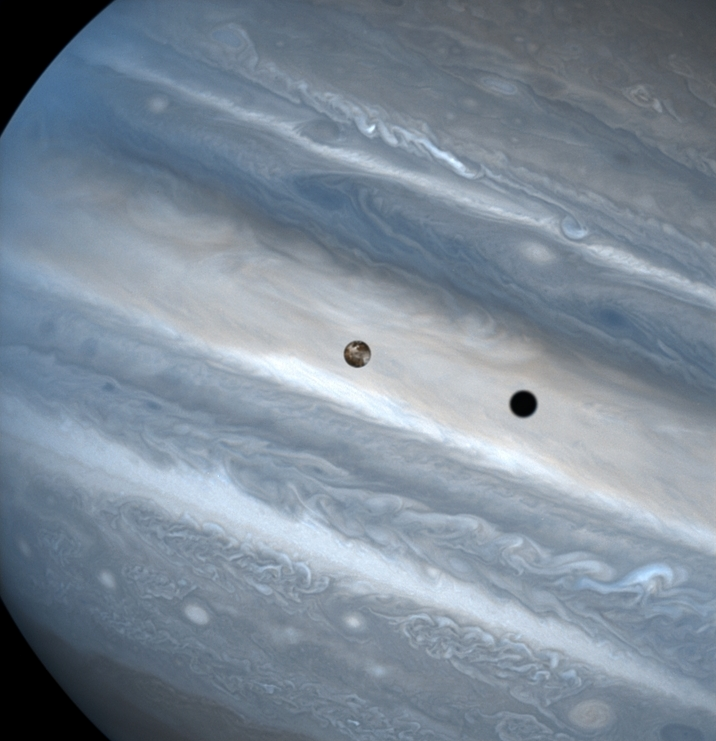

Io transit of Jupiter

The three snapshots of the volcanic moon rounding Jupiter were taken over a 1.8-hour time span. Io is roughly the size of Earth's moon but 2,000 times farther away. In two of the images, Io appears to be skimming Jupiter's cloud tops, but it's actually 310, 000 miles (500,000 kilometers) away. Io zips around Jupiter in 1.8 days, whereas the moon circles Earth every 28 days.

The conspicuous black spot on Jupiter is Io's shadow and is about the size of the moon itself (2,262 miles or 3,640 kilometers across). This shadow sails across the face of Jupiter at 38,000 mph (17 kilometers per second). The smallest details visible on Io and Jupiter measure 93 miles (150 kilometers) across, or about the size of Connecticut.

Credit: J. Spencer (Lowell Observatory) and NASA/ESA